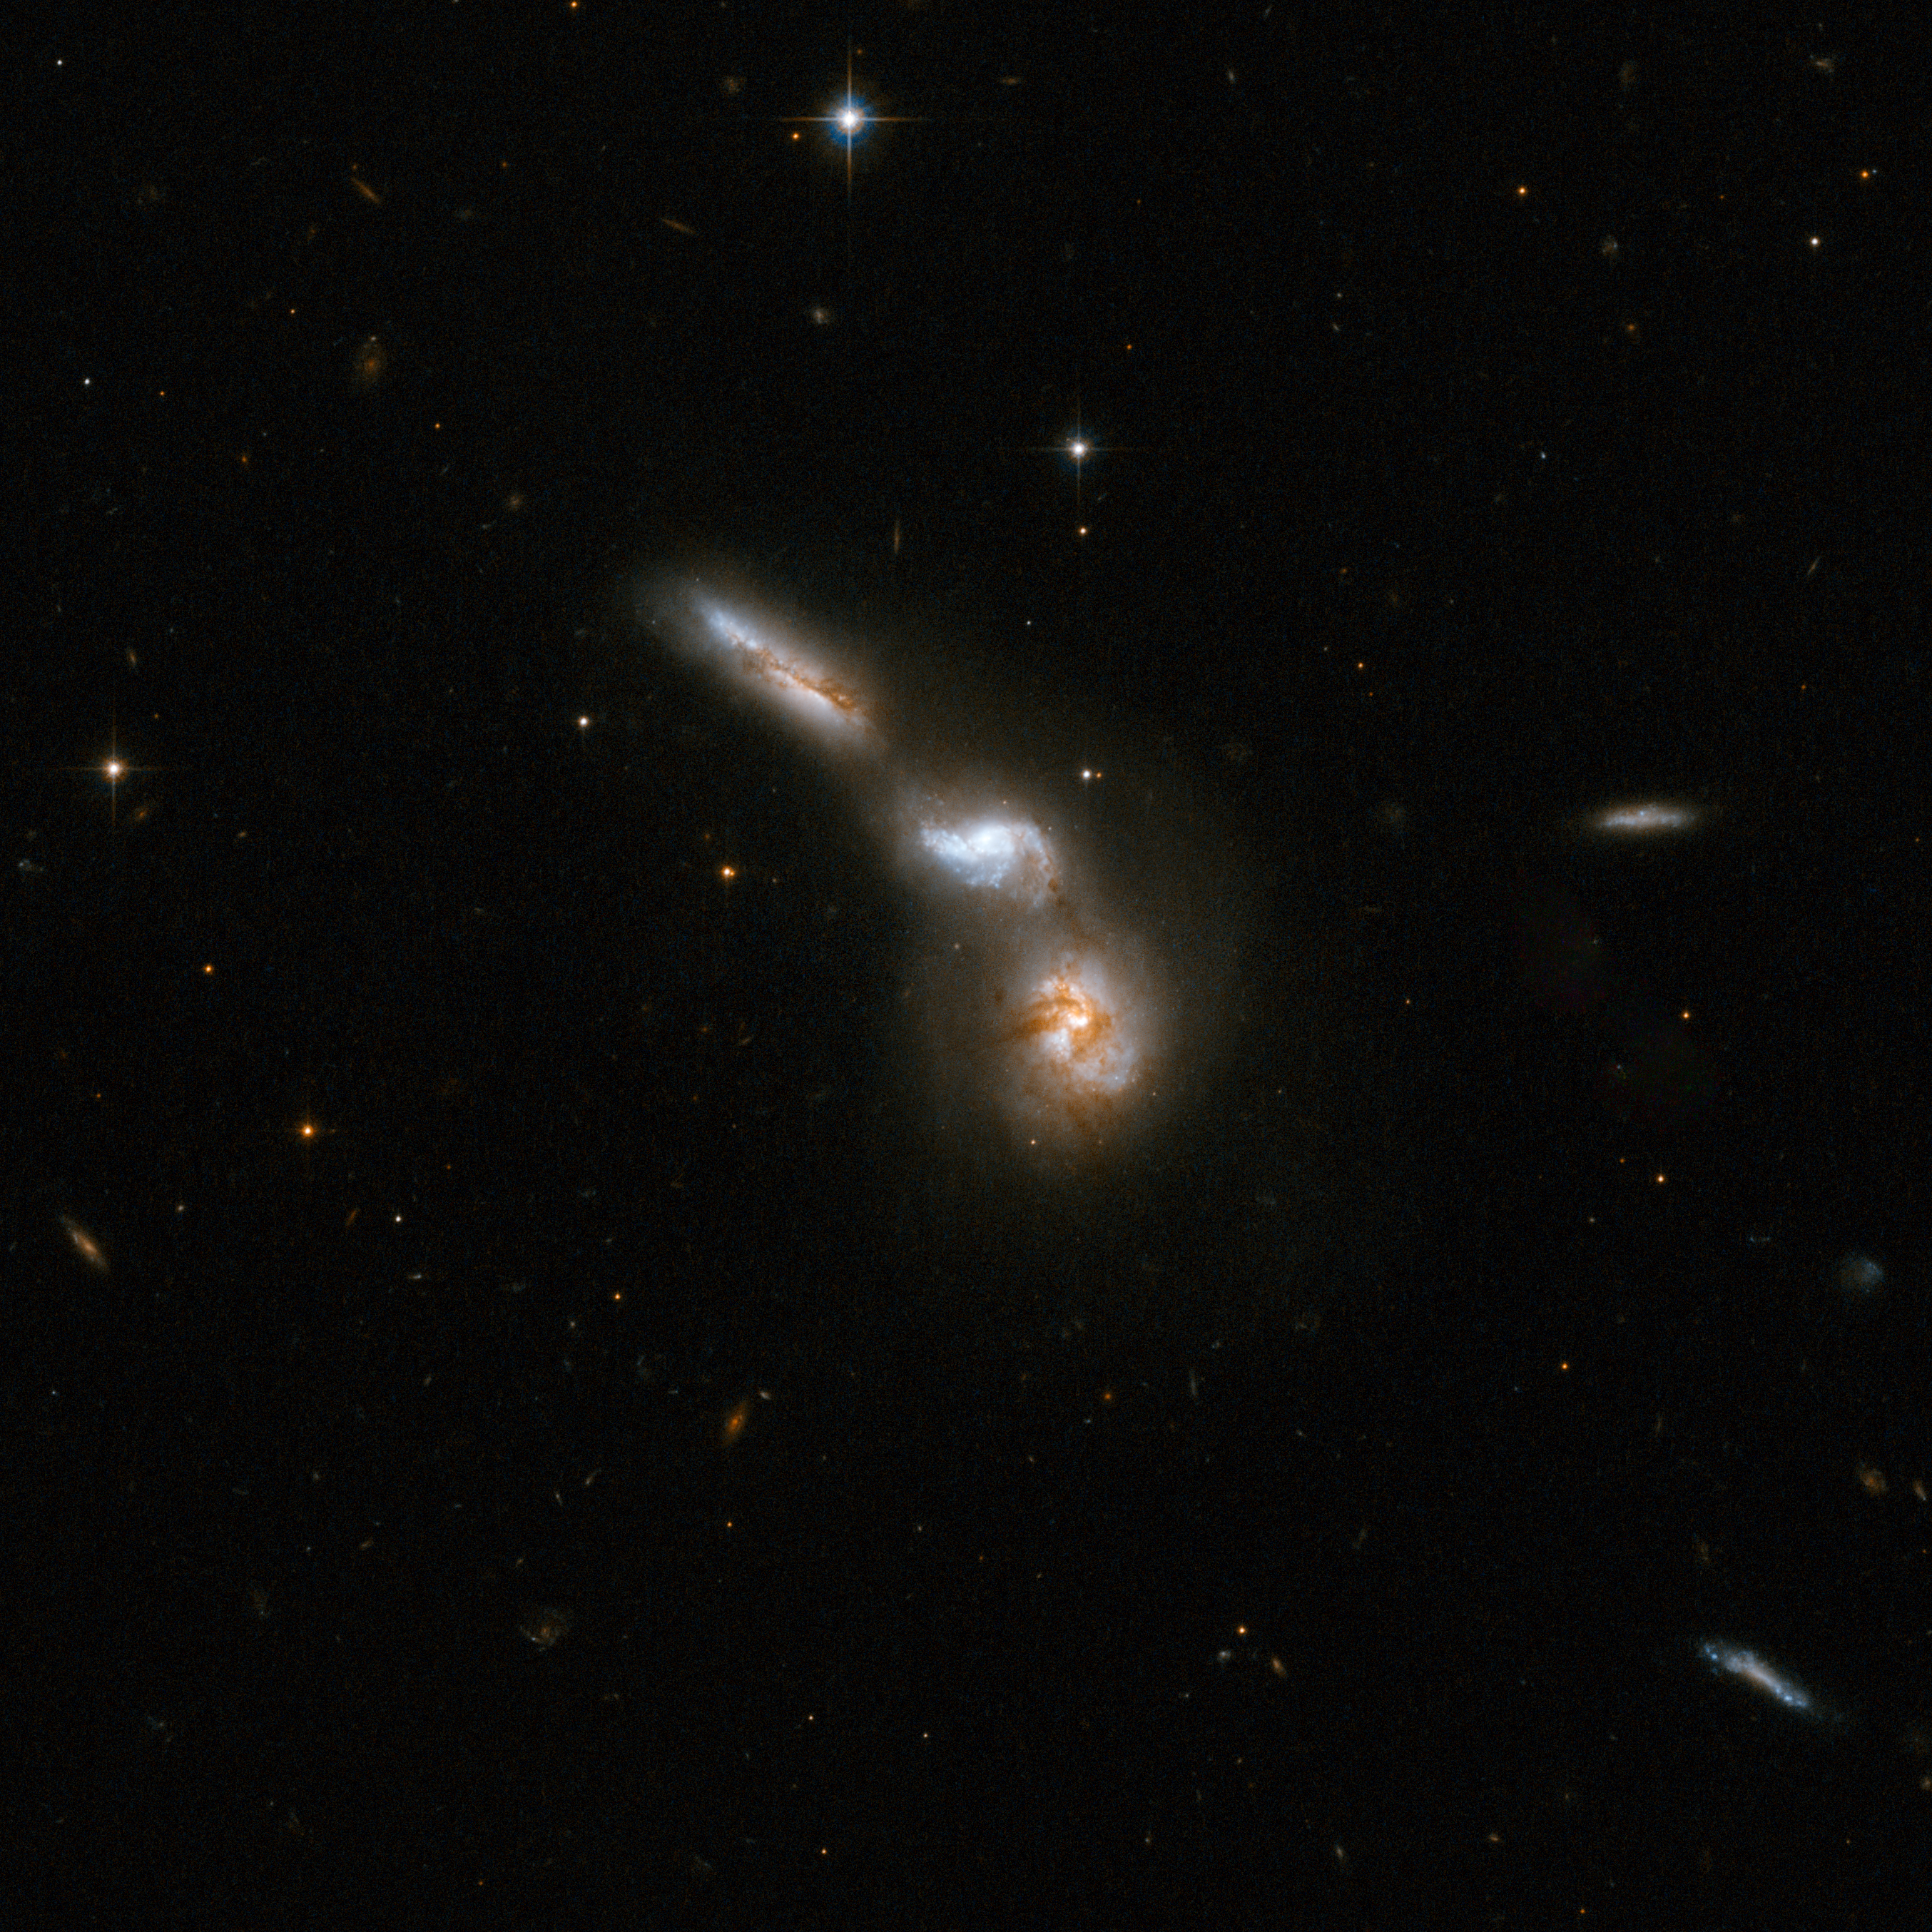

ESO 255-7

ESO 255-7 consists of a quartet of interacting galaxies. Three or four galaxies are embedded in a common structure with an arc-like shape. The upper part of this structure appears almost like one single galaxy but has in fact two component galaxies. The lowest galaxy is substantially obscured by dust. The interacting group is about 550 million light-years away from Earth, in the constellation of Puppis, the Stern.

This image is part of a large collection of 59 images of merging galaxies taken by the Hubble Space Telescope and released on the occasion of its 18th anniversary on 24th April 2008.

Credit: NASA, ESA, the Hubble Heritage Team (STScI/AURA)-ESA/Hubble Collaboration and A. Evans (University of Virginia, Charlottesville/NRAO/Stony Brook University)